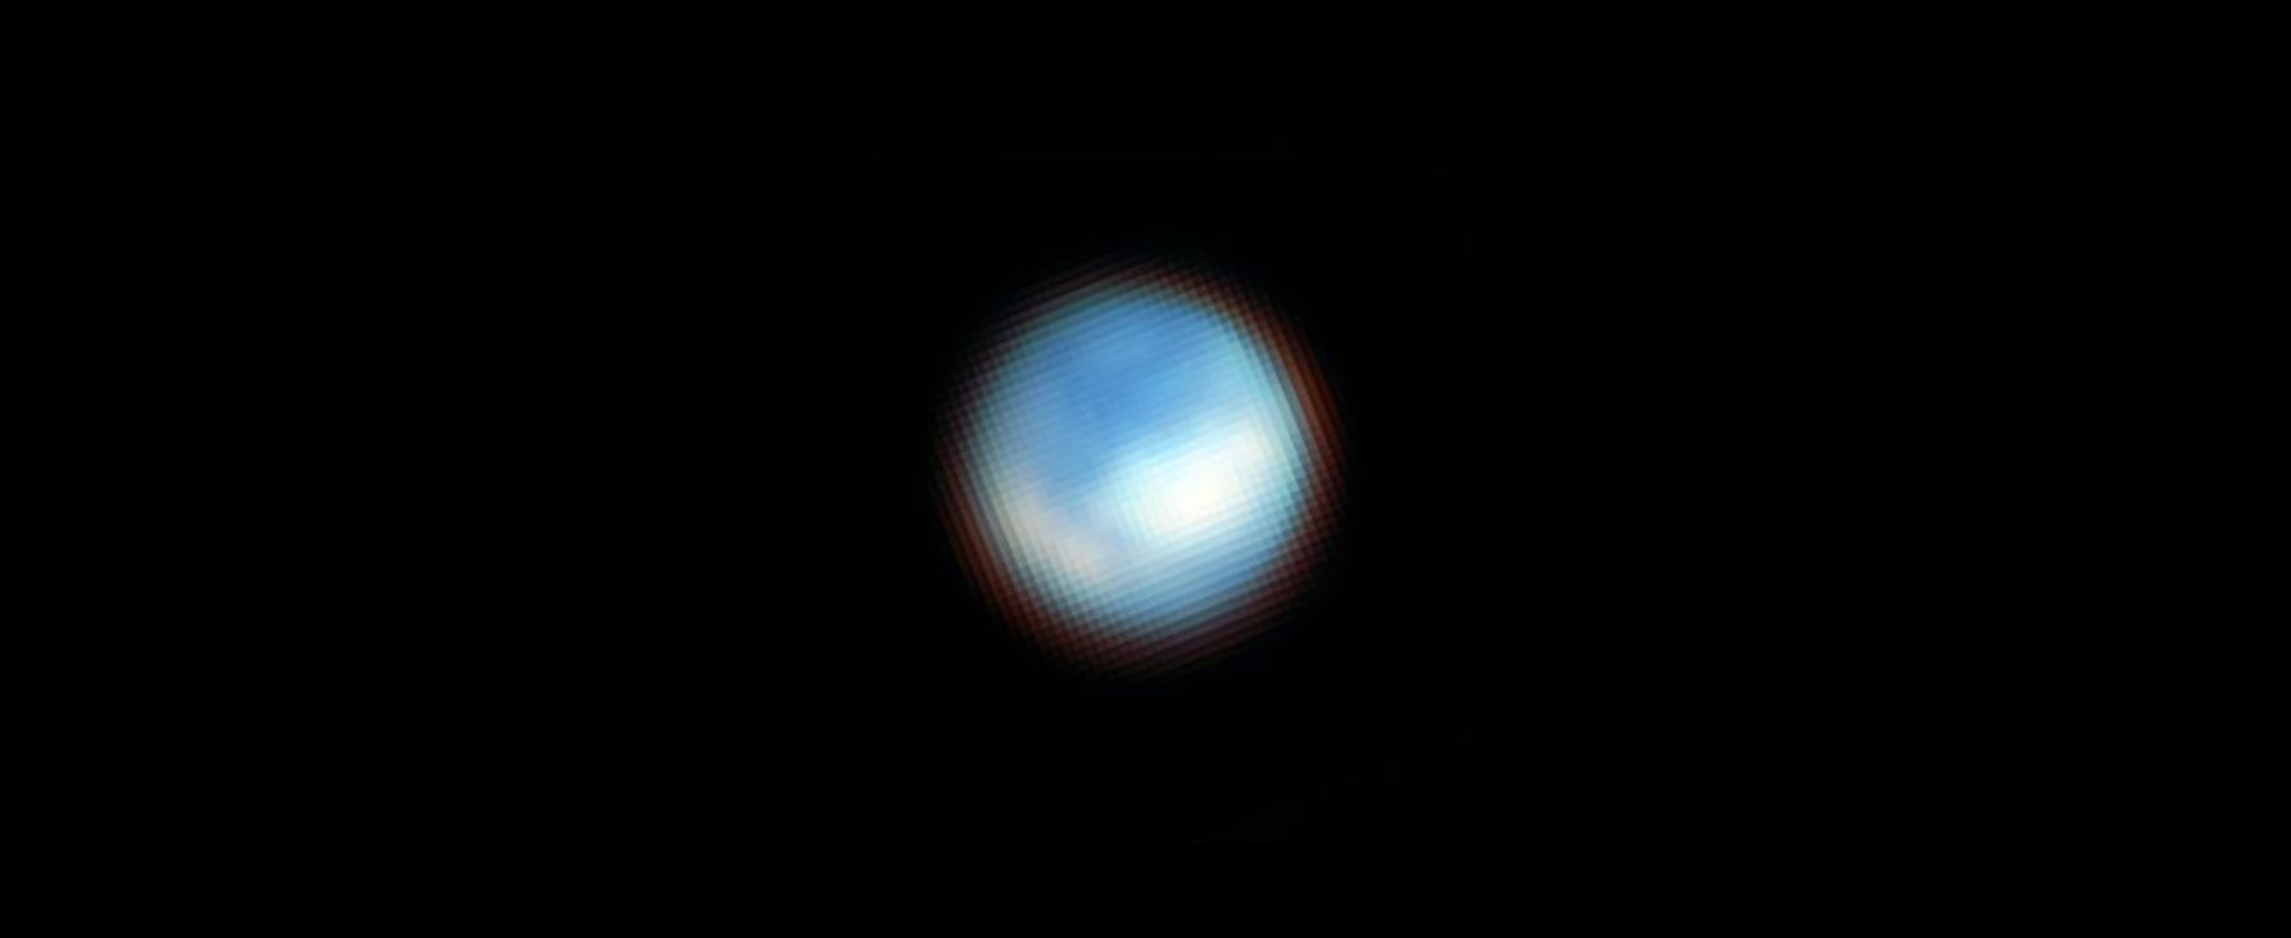

Europa (NIRCam image)

Webb’s NIRCam (Near Infrared Camera) captured this picture of the surface of Jupiter’s moon Europa. Webb identified carbon dioxide on the icy surface of Europa that likely originated in the moon’s subsurface ocean. This discovery has important implications for the potential habitability of Europa’s ocean. The moon appears mostly blue because it is brighter at shorter infrared wavelengths. The white features correspond with the chaos terrain Powys Regio (left) and Tara Regio (centre and right), which show enhanced carbon dioxide ice on the surface.

Credit: NASA, ESA, CSA, G. Villanueva (NASA/GSFC), S. Trumbo (Cornell Univ.), A. Pagan (STScI)